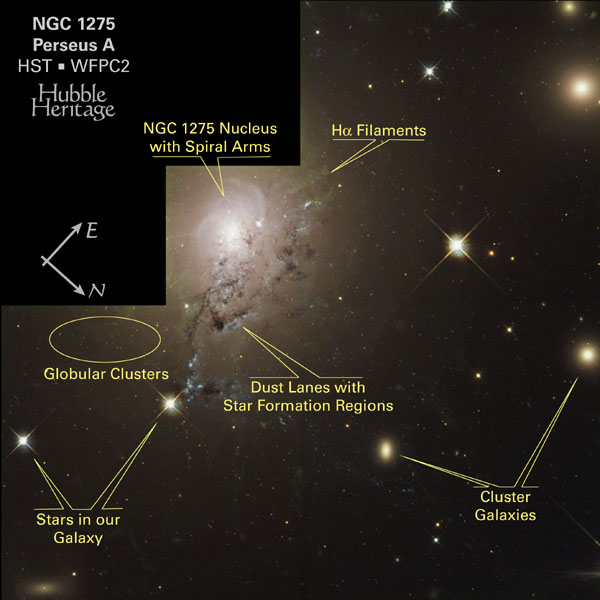

NGC 1275 - Labeled Features

This annotated images pinpoints several interesting areas of NGC 1275.

For more information, please search the archive for 'opo0314' or click the press release link below.

Credit: NASA/ESA and L. Frattare (STScI)